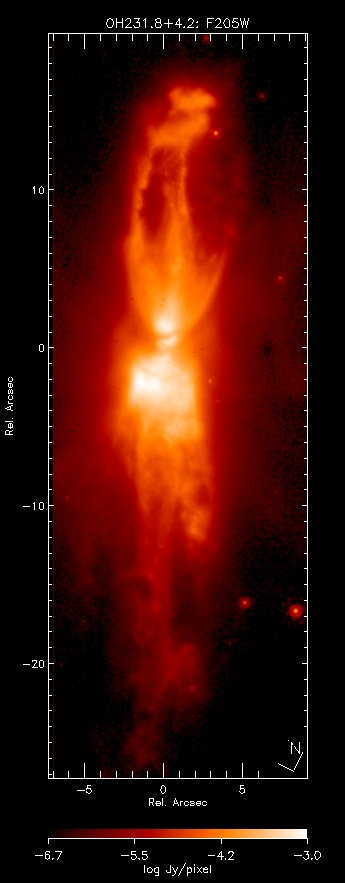

OH231.8+4.2 - Rotten Egg Nebula

Color-mapped K-band (F205W)

Credit: NASA,ESA, William B. Latter (SIRTF Science Center/California Institute of Technology), John H. Bieging (University of Arizona), Casey Meakin (University of Arizona), A.G.G.M. Tielens (Kapteyn Astronomical Institute), Aditya Dayal (IPAC/NASA Jet Propulsion Laboratory), Joseph L. Hora (Center for Astrophysics), and Douglas M. Kelly (University of Arizona).